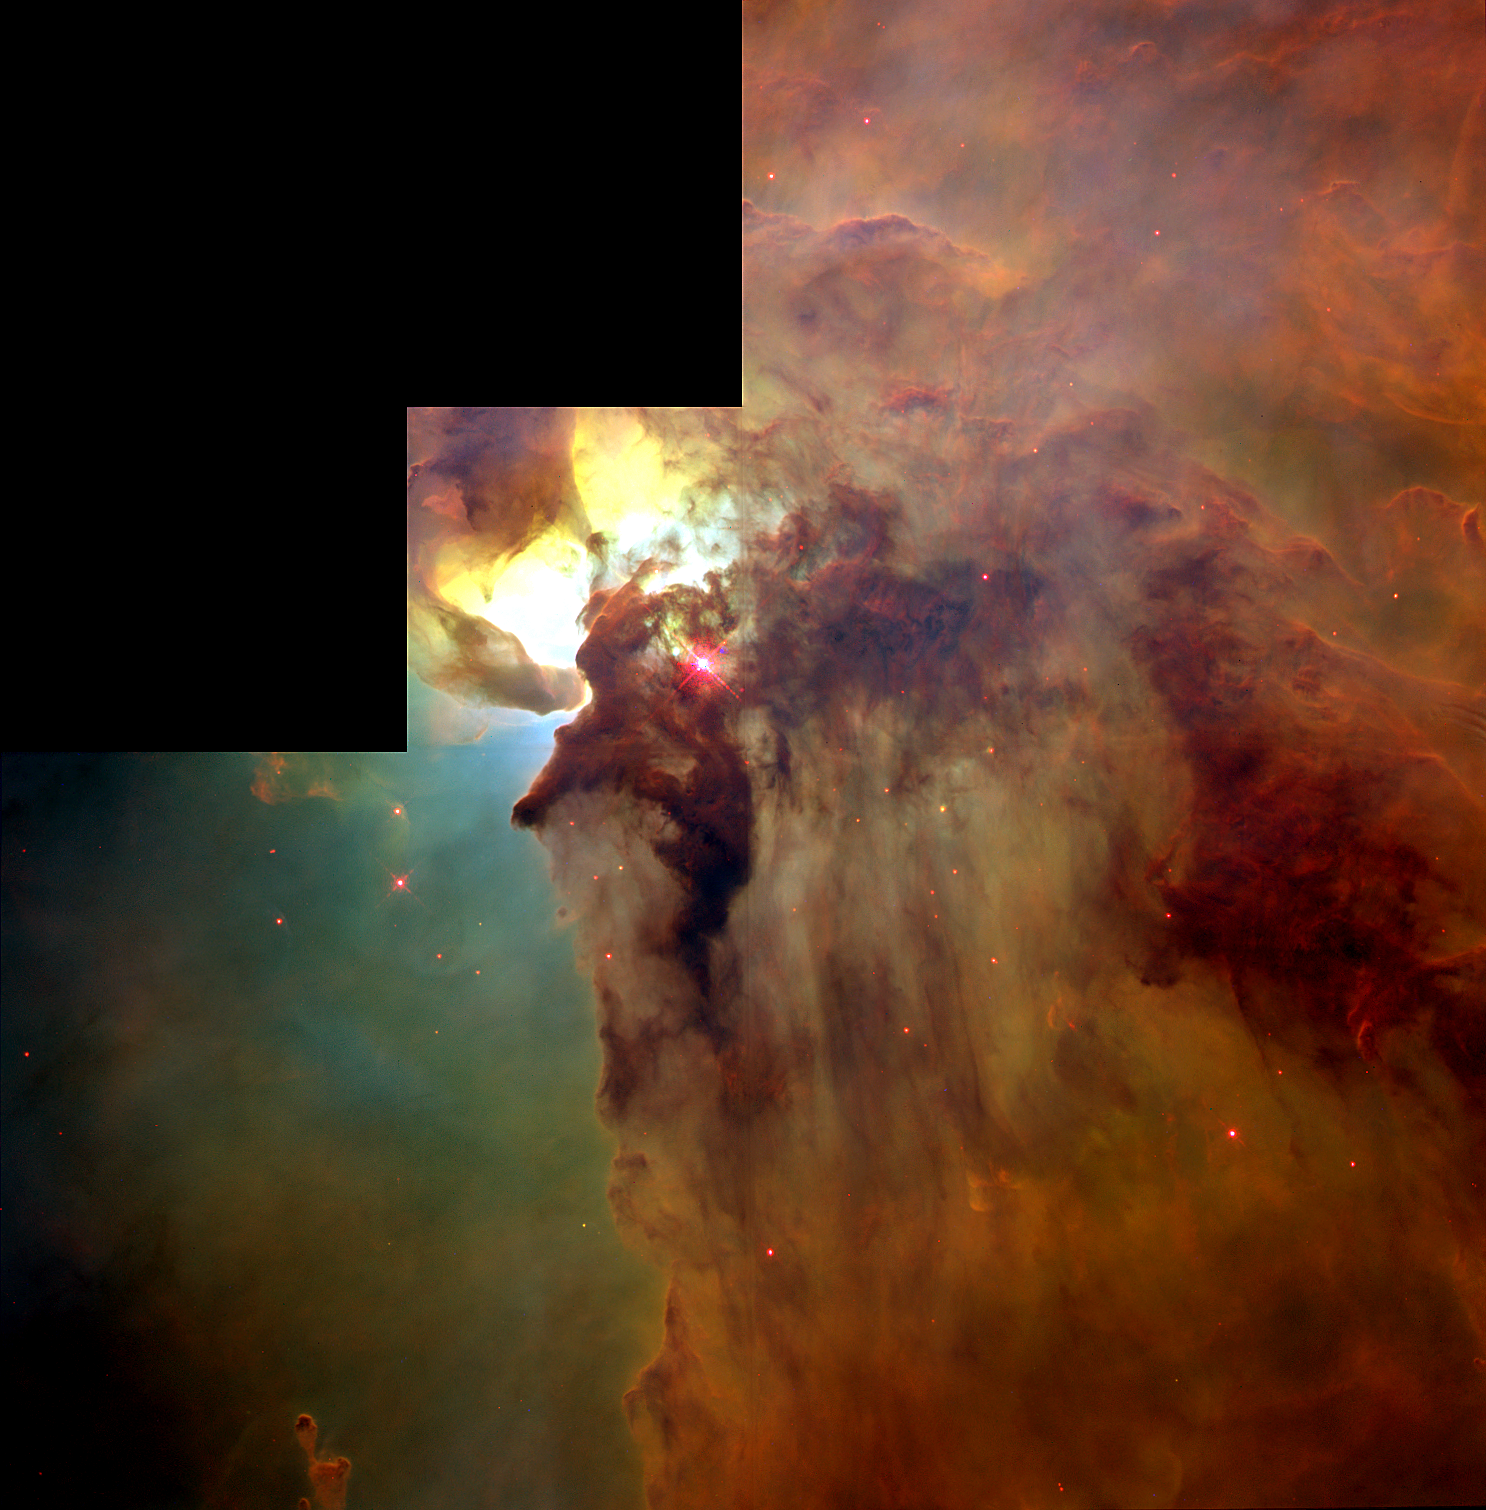

Giant 'Twisters' in the Lagoon Nebula

This Hubble Space Telescope (HST) image reveals a pair of one-half light-year long interstellar 'twisters' -- eerie funnels and twisted-rope structures (upper left) -- in the heart of the Lagoon Nebula (Messier 8) which lies 5, 000 light-years away in the direction of the constellation Sagittarius.

Credit: A. Caulet (ST-ECF, ESA) and NASA